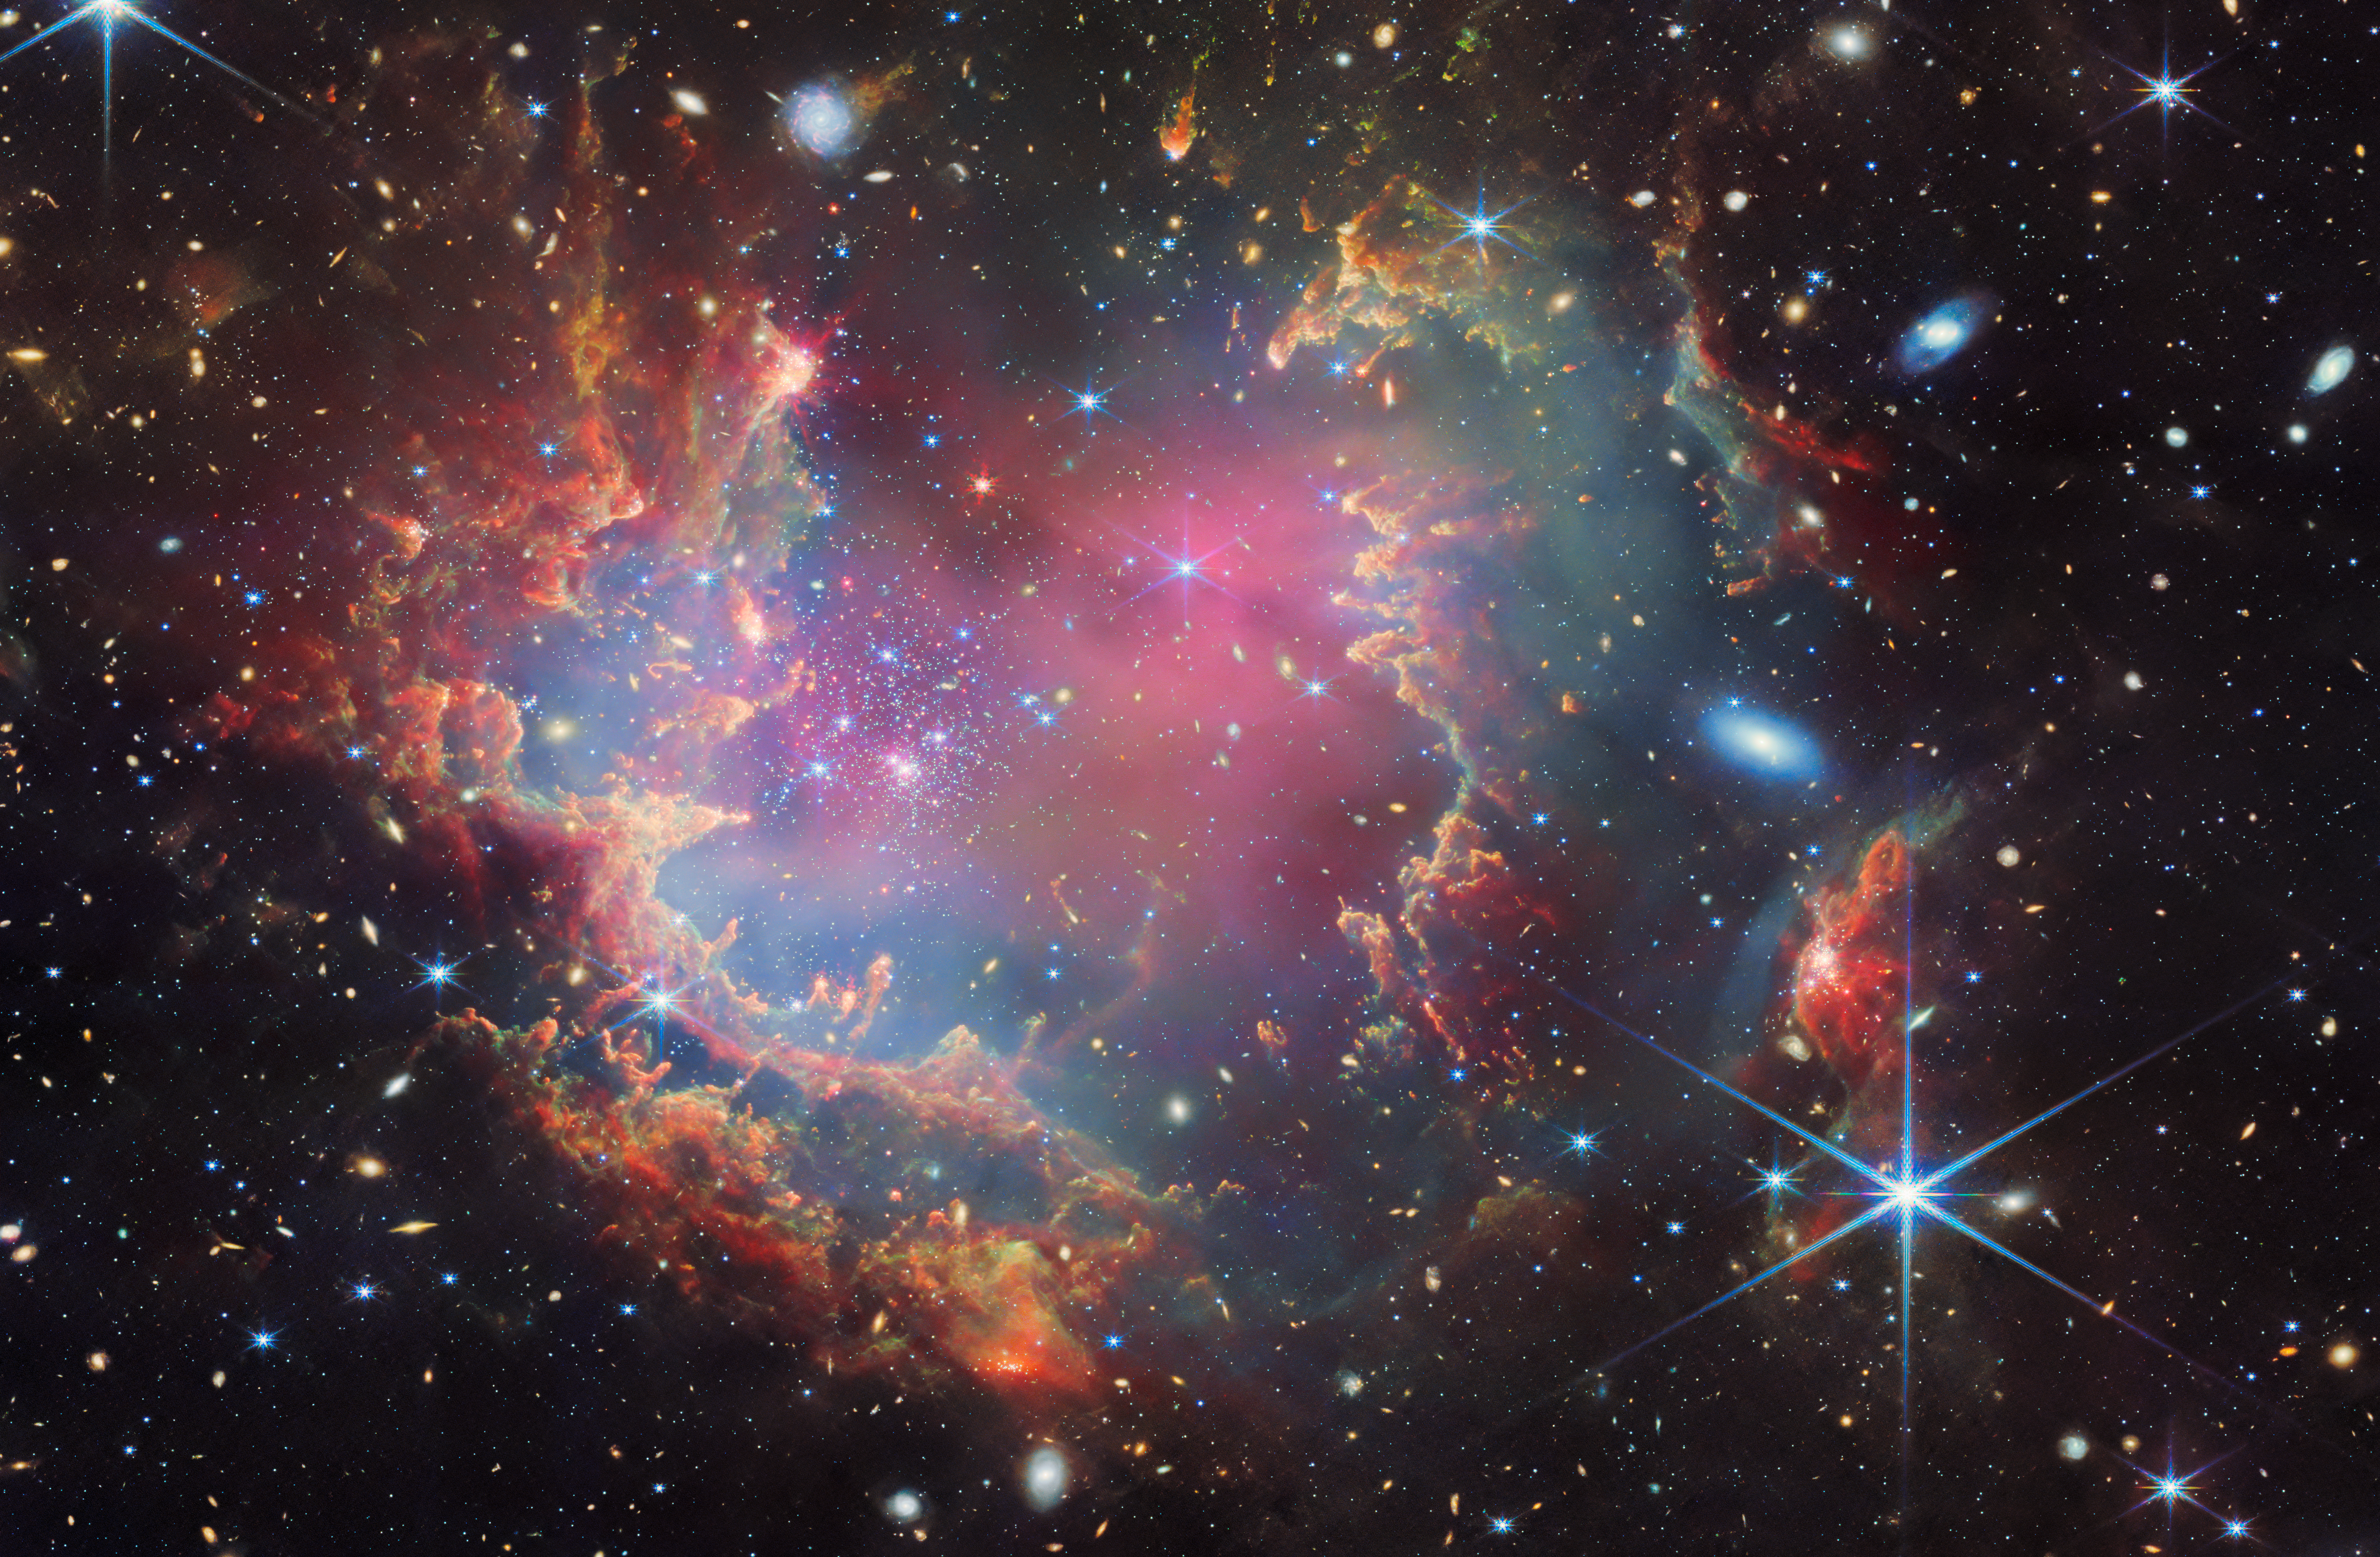

NGC 602 (NIRCam and MIRI image)

Near the outskirts of the Small Magellanic Cloud, a satellite galaxy roughly 200 000 light-years from Earth, lies the young star cluster NGC 602, which is featured in this new image from the NASA/ESA/CSA James Webb Space Telescope. This image includes data from Webb’s NIRCam (Near-InfraRed Camera) and MIRI (Mid-InfraRed Instrument).

The local environment of this cluster is a close analogue of what existed in the early Universe, with very low abundances of elements heavier than hydrogen and helium. The existence of dark clouds of dense dust and the fact that the cluster is rich in ionised gas also suggest the presence of ongoing star formation processes. This cluster provides a valuable opportunity to examine star formation scenarios under dramatically different conditions from those in the solar neighbourhood.

An international team of astronomers, including Peter Zeidler, Elena Sabbi, and Antonella Nota, used Webb to observe NGC 602 and detected candidates for the first young brown dwarfs outside our Milky Way.

Credit: ESA/Webb, NASA & CSA, P. Zeidler, E. Sabbi, A. Nota, M. Zamani (ESA/Webb)